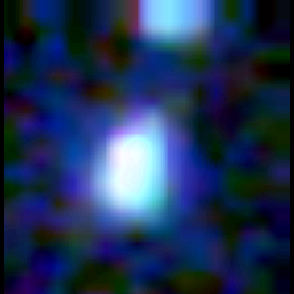

Galaxy building blocks

This is one Proto Galaxy out of a series of 18, taken by the Wide Field Planetary Camera 2.

Credit: Rogier Windhorst and Sam Pascarelle (Arizona State University) and NASA/ESA